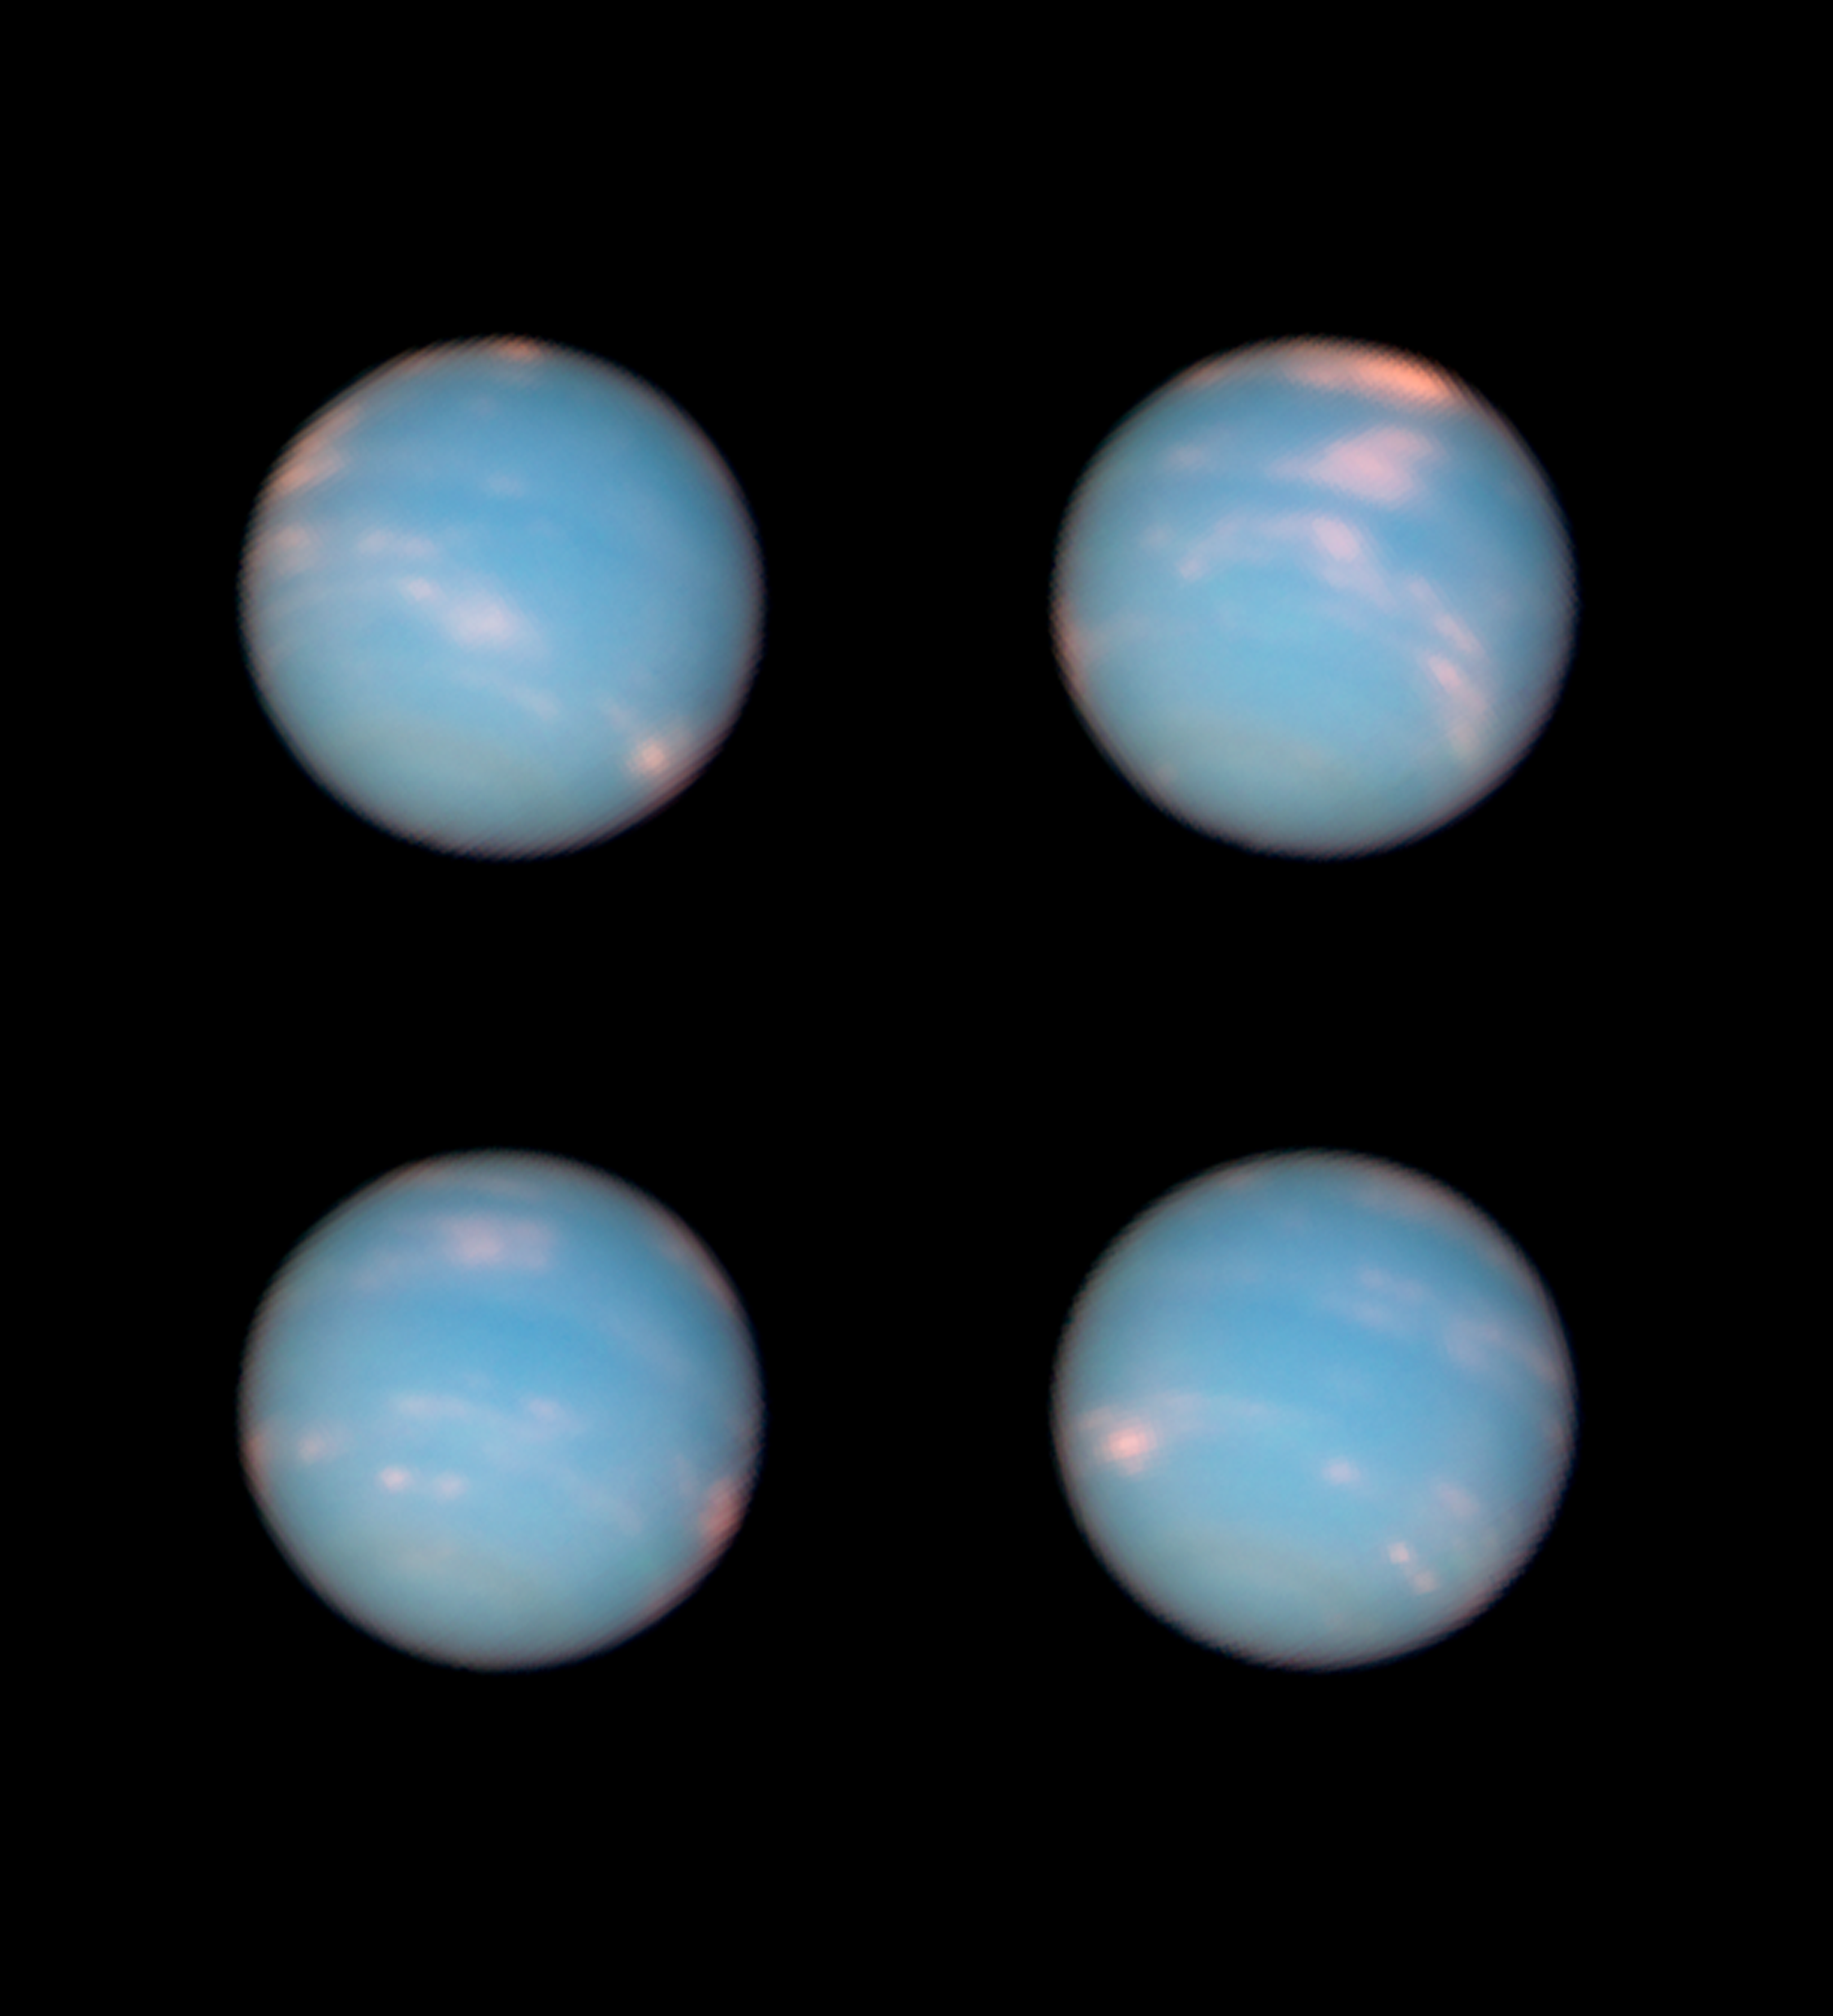

Happy birthday Neptune

These four images, taken a few hours apart with the NASA/ESA Hubble Space Telescope’s Wide Field Camera 3, show Neptune, the eighth and outermost planet of the Solar System. Hubble’s images were taken to celebrate the first complete orbit of the planet since its discovery in 1846. The four images show different faces of the planet as it rotates on its axis.

Credit: NASA, ESA and the Hubble Heritage Team (STScI/AURA)